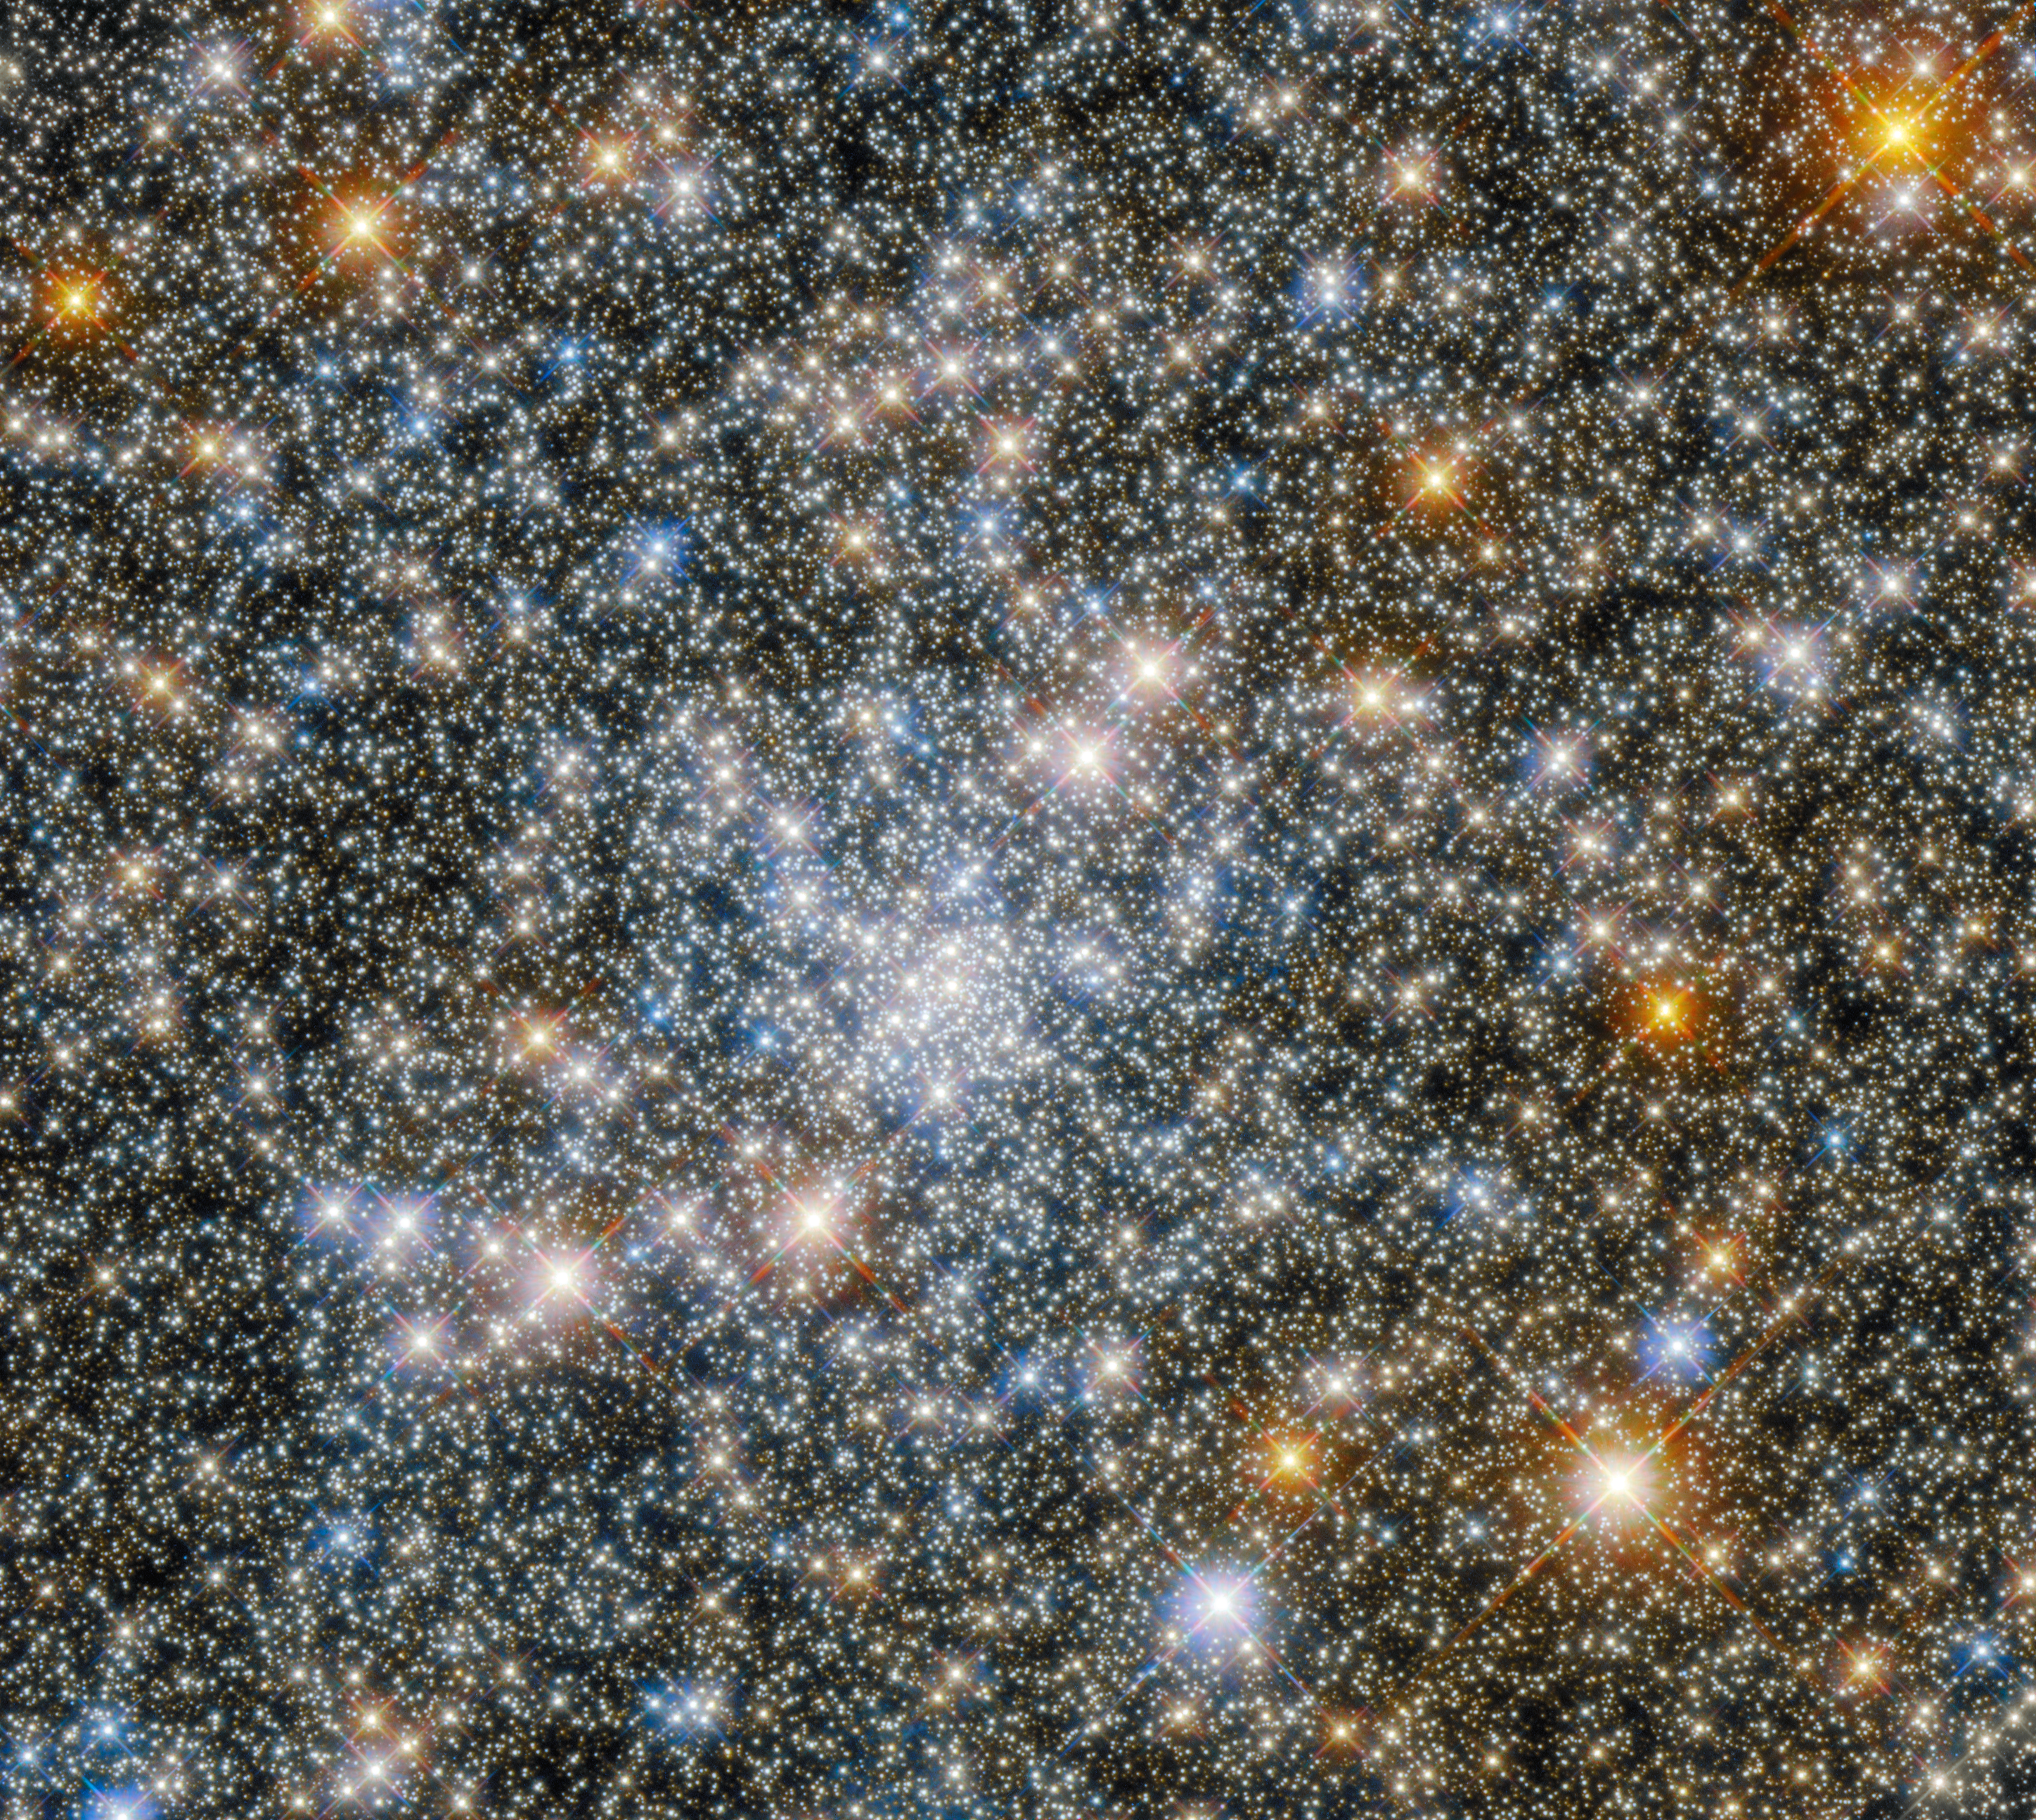

Hubble Spies a Scintillating Globular Cluster

This scintillating image showcases the globular cluster NGC 6540 in the constellation Sagittarius, which was captured by the NASA/ESA Hubble Space Telescope’s Wide Field Camera 3 and Advanced Camera for Surveys. These two instruments have slightly different fields of view — which determines how large an area of sky each instrument captures. This composite image shows the star-studded area of sky that was captured in both instruments’ field of view.

NGC 6540 is a globular cluster, a stable, tightly bound multitude of stars. The populations of these clusters can range from tens of thousands to millions of stars, all of which are trapped in a closely-packed group by their mutual gravitational attraction.

The brightest stars in this image are adorned with prominent cross-shaped patterns of light known as diffraction spikes. These astronomical embellishments are a type of imaging artefact, meaning that they are caused by the structure of Hubble rather than the stars themselves. The path taken by the starlight as it enters the telescope is slightly disturbed by its internal structure, causing bright objects to be surrounded by spikes of light.

Hubble peered into the heart of NGC 6540 to help astronomers measure the ages, shapes, and structures of globular clusters towards the centre of the Milky Way. The gas and dust shrouding the centre of our galaxy block some of the light from these clusters, as well as subtly changing the colours of their stars. Globular clusters contain insights into the earliest history of the Milky Way, and so studying them can help astronomers understand how our galaxy has evolved.

Credit: ESA/Hubble & NASA, R. Cohen